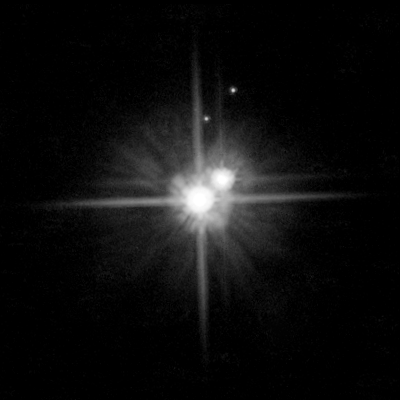

Pluto system: February 15, 2006

This picture by Hubble shows the system of the dwarf planet Pluto, seen on February 15, 2006. Pluto as well as its moon Charon are both visible as bright stars.

Discovered in 1930, Pluto was originally classified as ninth planet of the Solar System. However, the discovery of numerous objects of similar size and mass found since the 1970s orbiting the Sun at large distance, questioned its status as a planet. In 2006 the International Astronomical Union (IAU) defined formally the definition of a planet and reclassified Pluto this way to the new dwarf planet category.

Credit: NASA, ESA, H. Weaver (Johns Hopkins University/Applied Physics Lab), A. Stern (Southwest Research Institute), and the HST Pluto Companion Search Team